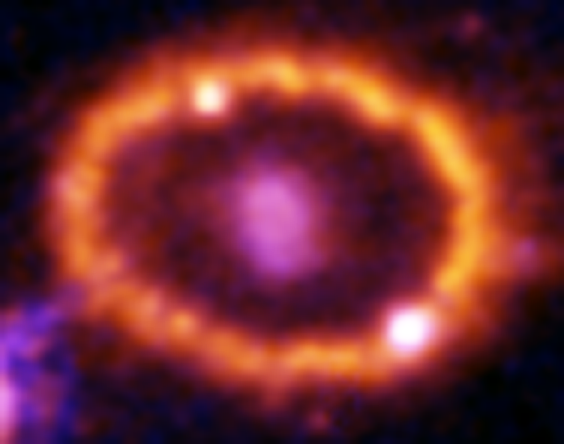

Hubble Supernova 1987A Scrapbook (1994-2003) - Image 7

in 1987, astronomers spotted the brightest stellar explosion ever seen since the one observed by Johannes Kepler over 400 years ago. Called SN 1987A, the titanic supernova explosion blazed with the power of 100,000,000 suns for several months following its discovery on Feb. 23 of that year. Although the supernova itself is over a million times fainter than when it was first discovered, a new light show in the space surrounding it is just beginning.

Credit: NASA/ESA, P. Challis, R. Kirshner (Harvard-Smithsonian Center for Astrophysics) and B. Sugerman (STScI)